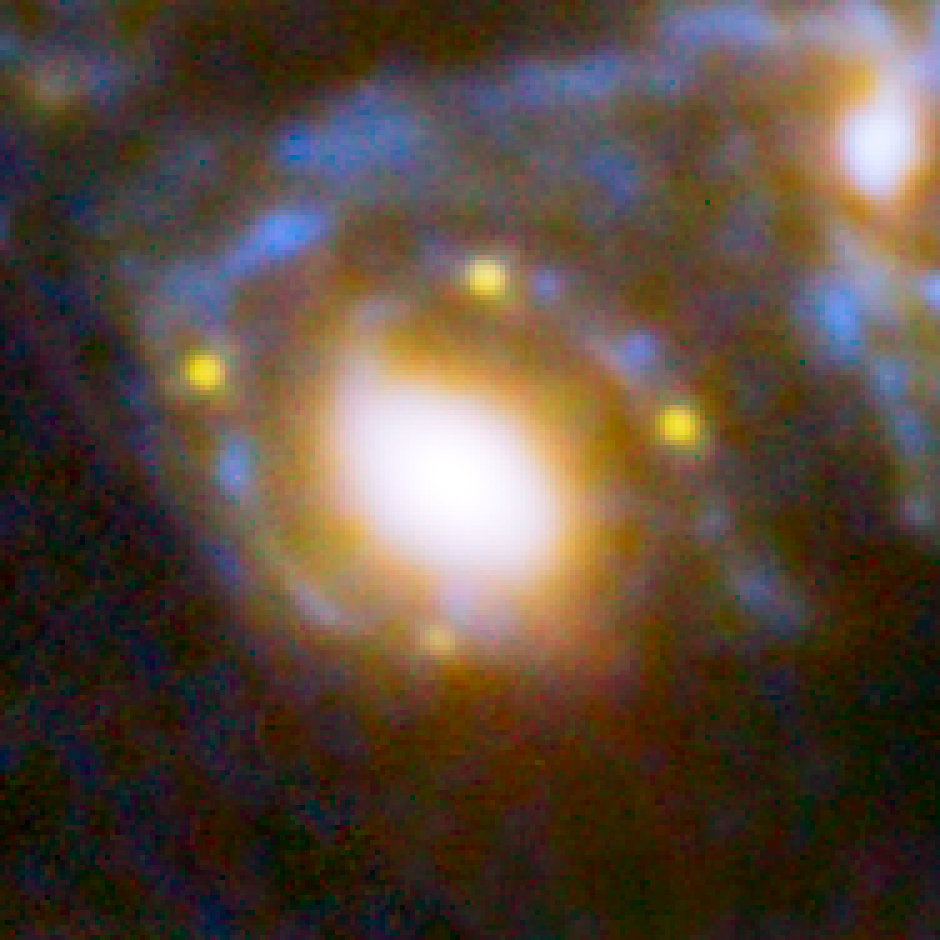

Four supernova images in an Einstein cross

This image shows four different images of the same supernova whose light has been distorted and magnified by the huge galaxy cluster MACS J1149+2223 in front of it.

The huge mass of the cluster and one of the galaxies within it is bending the light from a supernova behind them and creating four separate images of the supernova. The light has been magnified and distorted due to gravitational lensing and as a result the images are arranged around the elliptical galaxy in a formation known as an Einstein cross.

Credit: NASA, ESA, S. Rodney (John Hopkins University, USA) and the FrontierSN team; T. Treu (University of California Los Angeles, USA), P. Kelly (University of California Berkeley, USA) and the GLASS team; J. Lotz (STScI) and the Frontier Fields team; M. Postman (STScI) and the CLASH team; and Z. Levay (STScI)